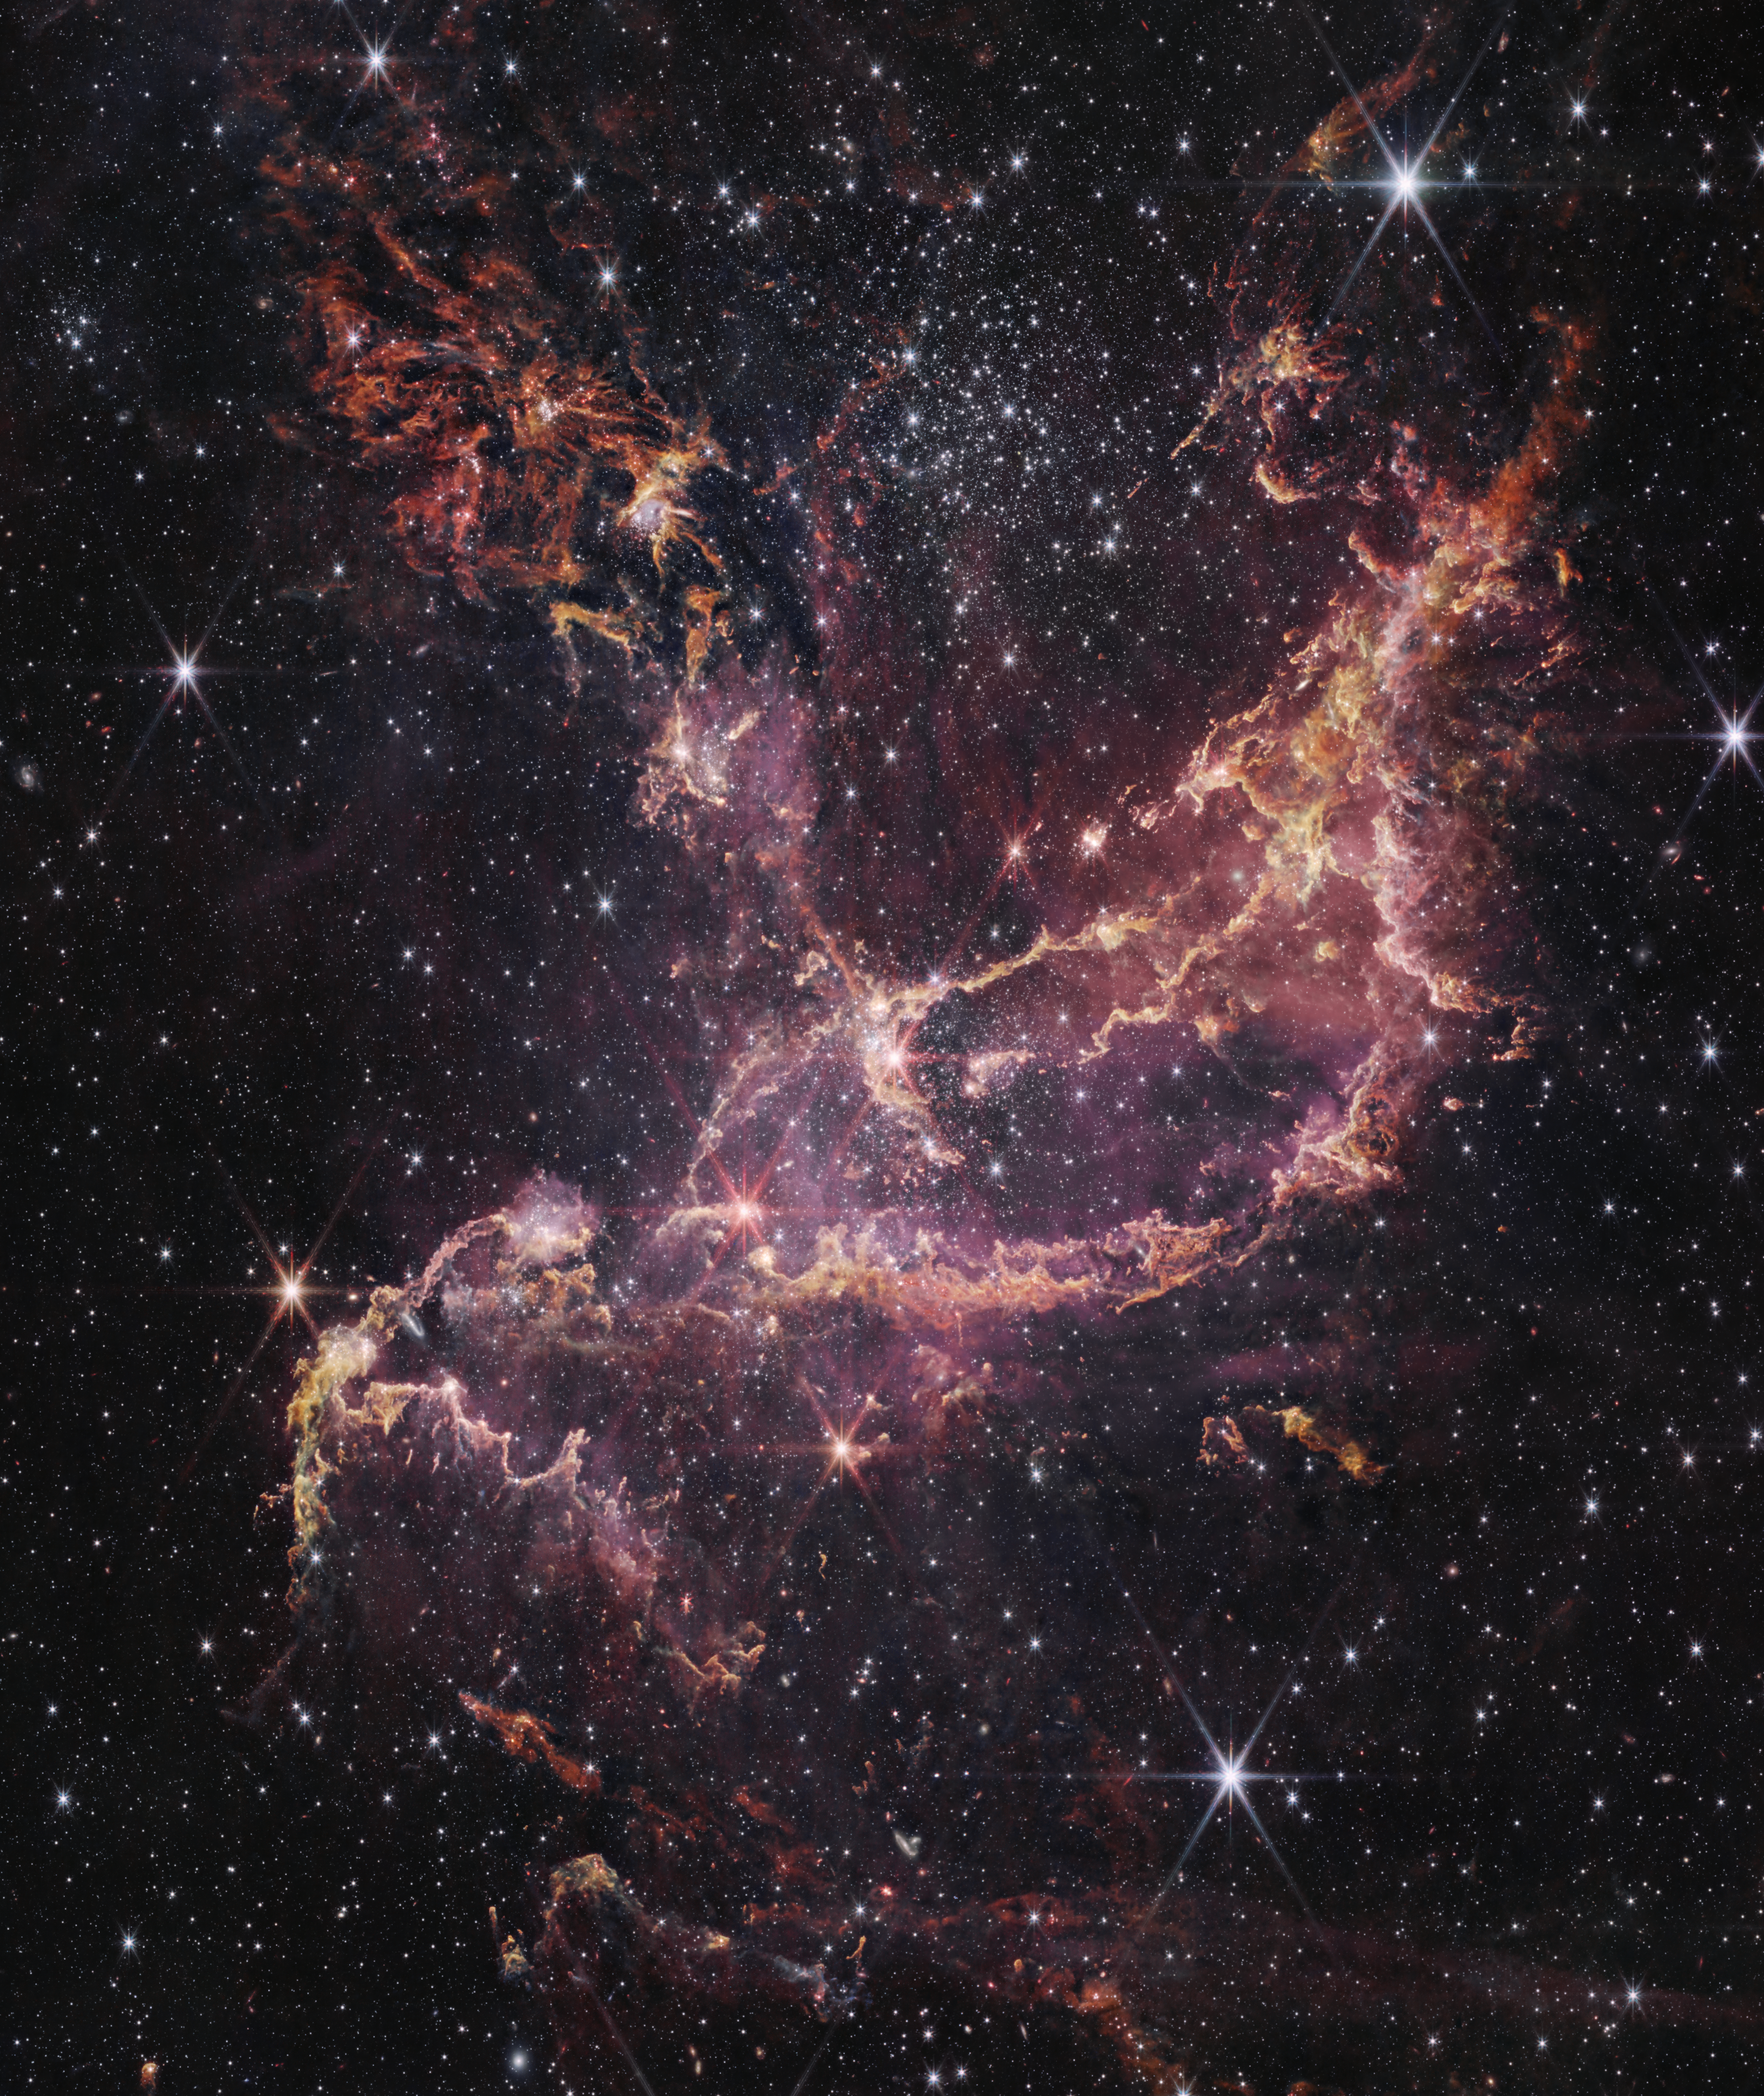

NGC 346 (Webb)

This image features NGC 346, one of the most dynamic star-forming regions in nearby galaxies, as seen by the NASA/ESA/CSA James Webb Space Telescope.

NCG 346 is located in the Small Magellanic Cloud (SMC), a dwarf galaxy close to our Milky Way.

Credit: NASA, ESA, CSA, STScI, A. Pagan (STScI)